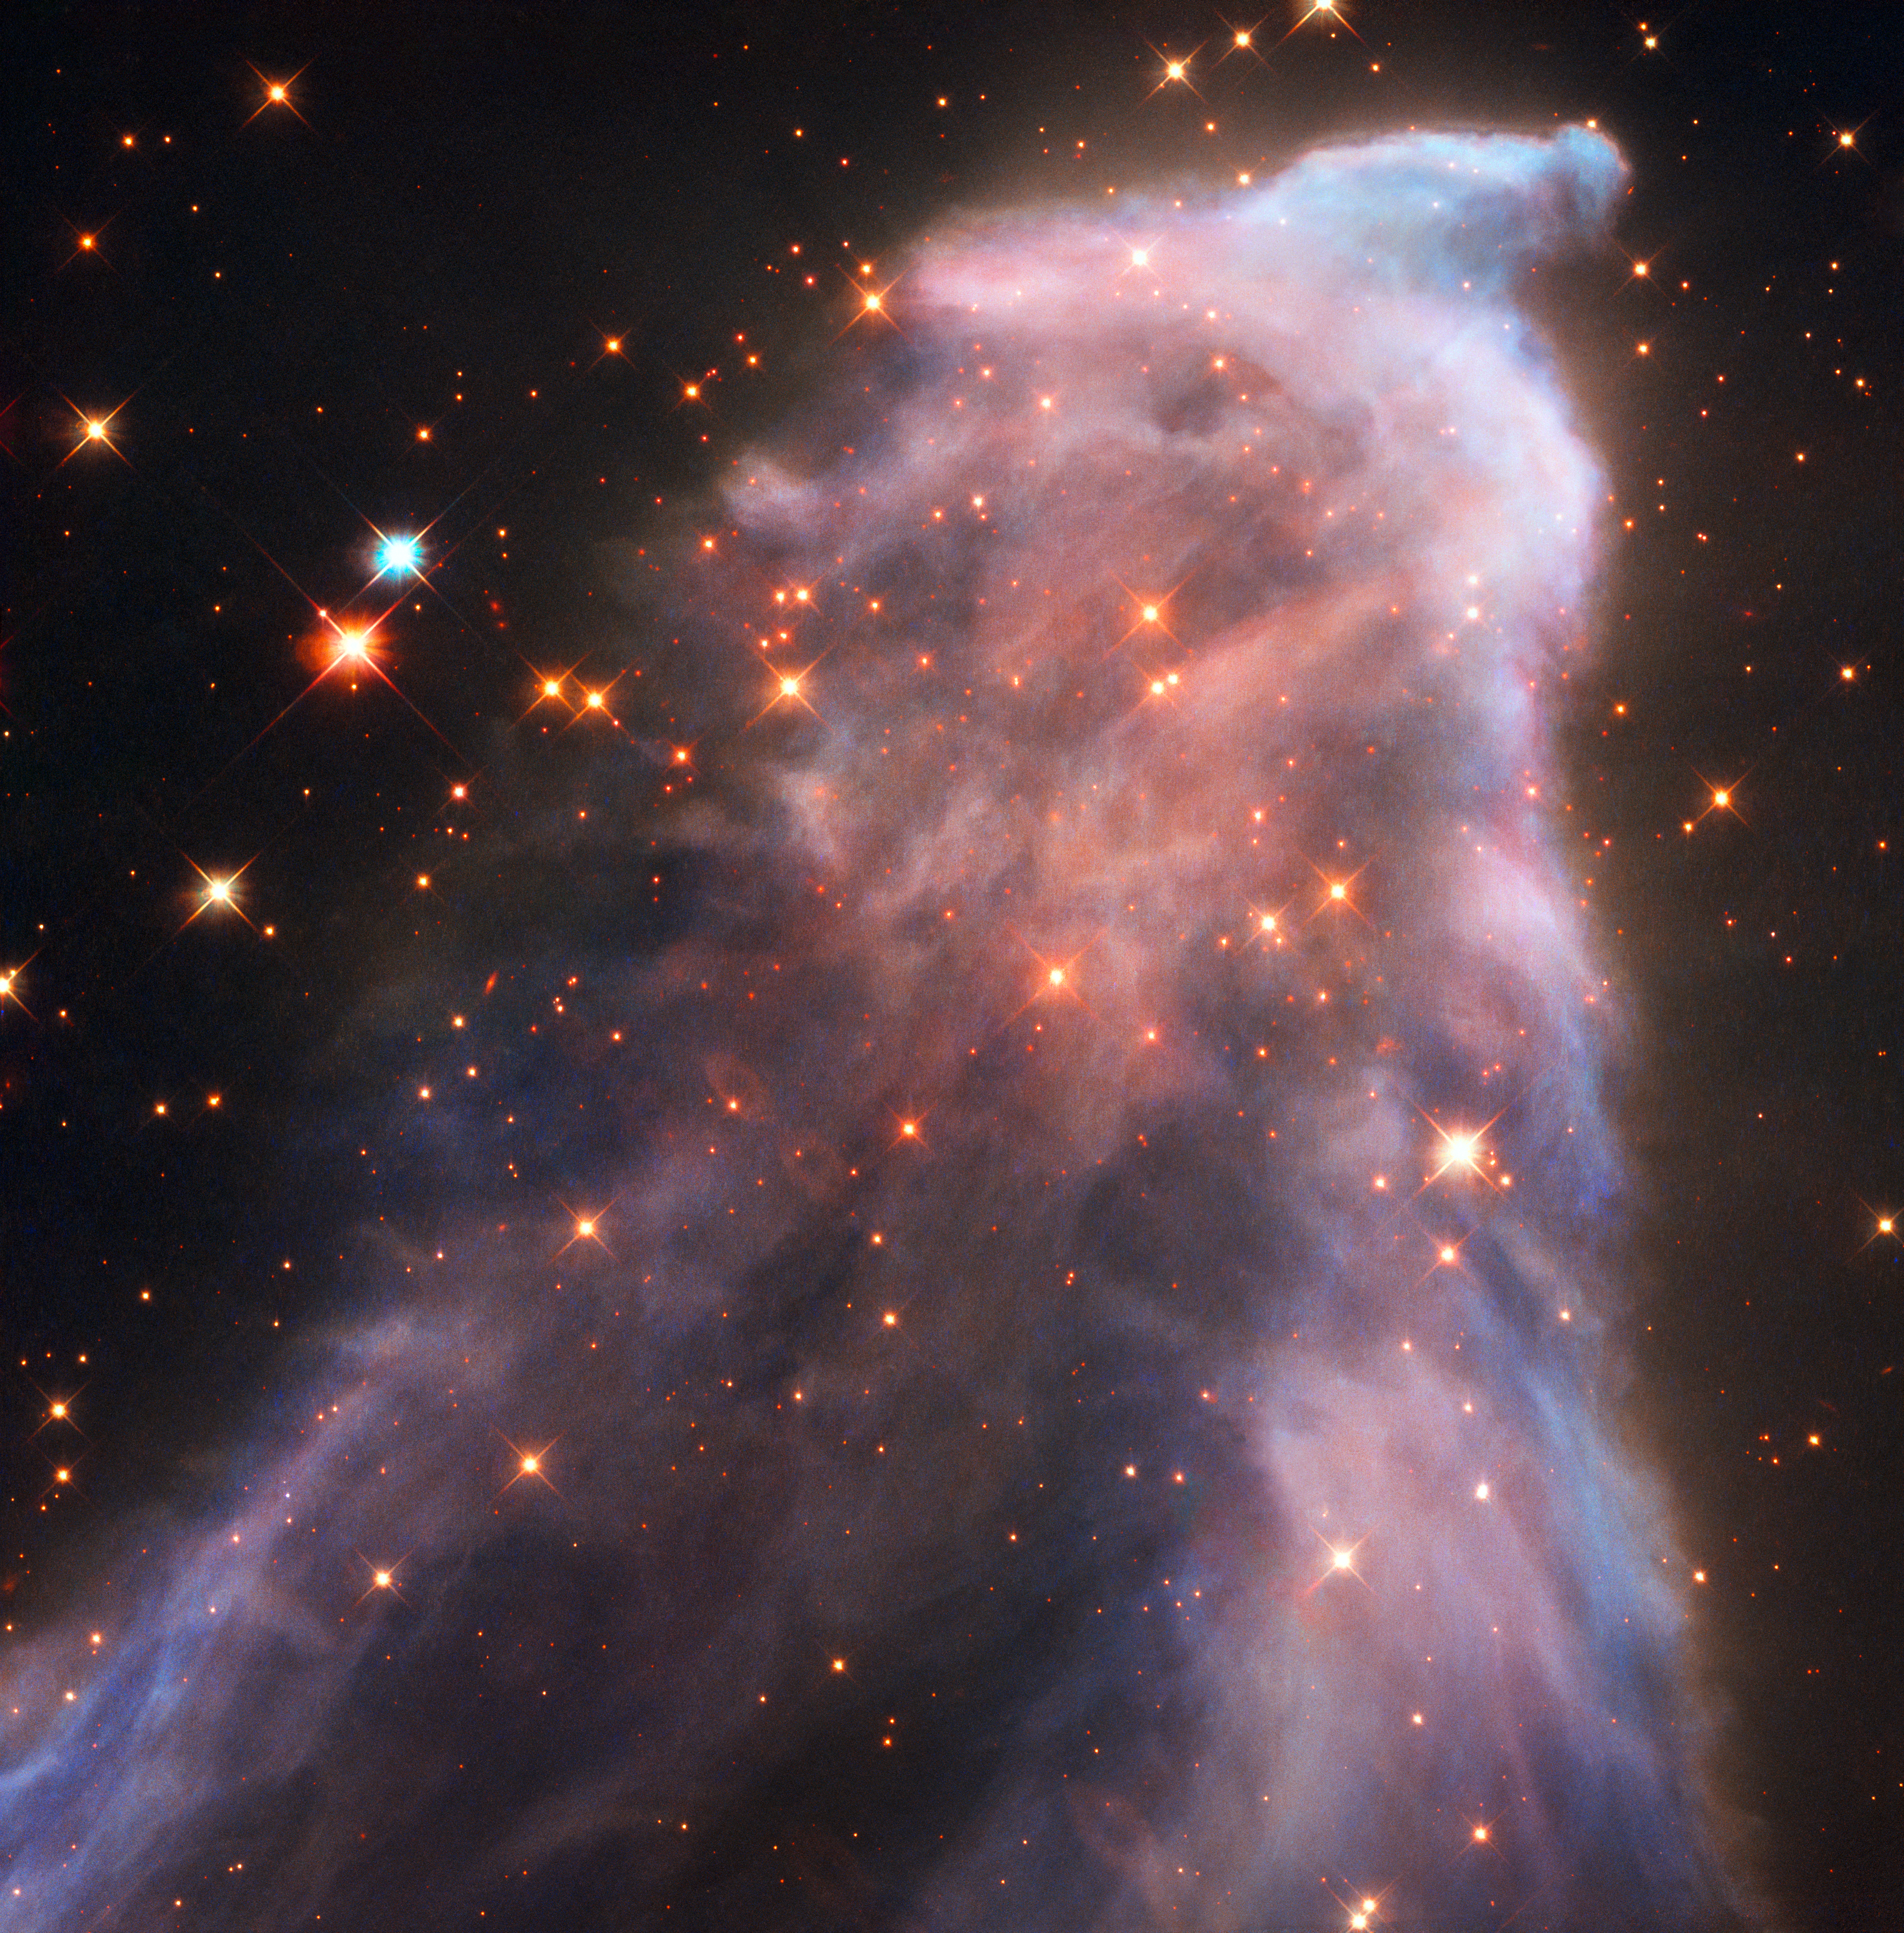

The Ghost Nebula

IC 63 — nicknamed the Ghost Nebula — is about 550 light-years from Earth. The nebula is classified as both a reflection nebula — as it is reflecting the light of a nearby star — and as an emission nebula — as it releases hydrogen-alpha radiation. Both effects are caused by the gigantic star Gamma Cassiopeiae. The radiation of this star is also slowly causing the nebula to dissipate.

Credit: ESA/Hubble, NASA